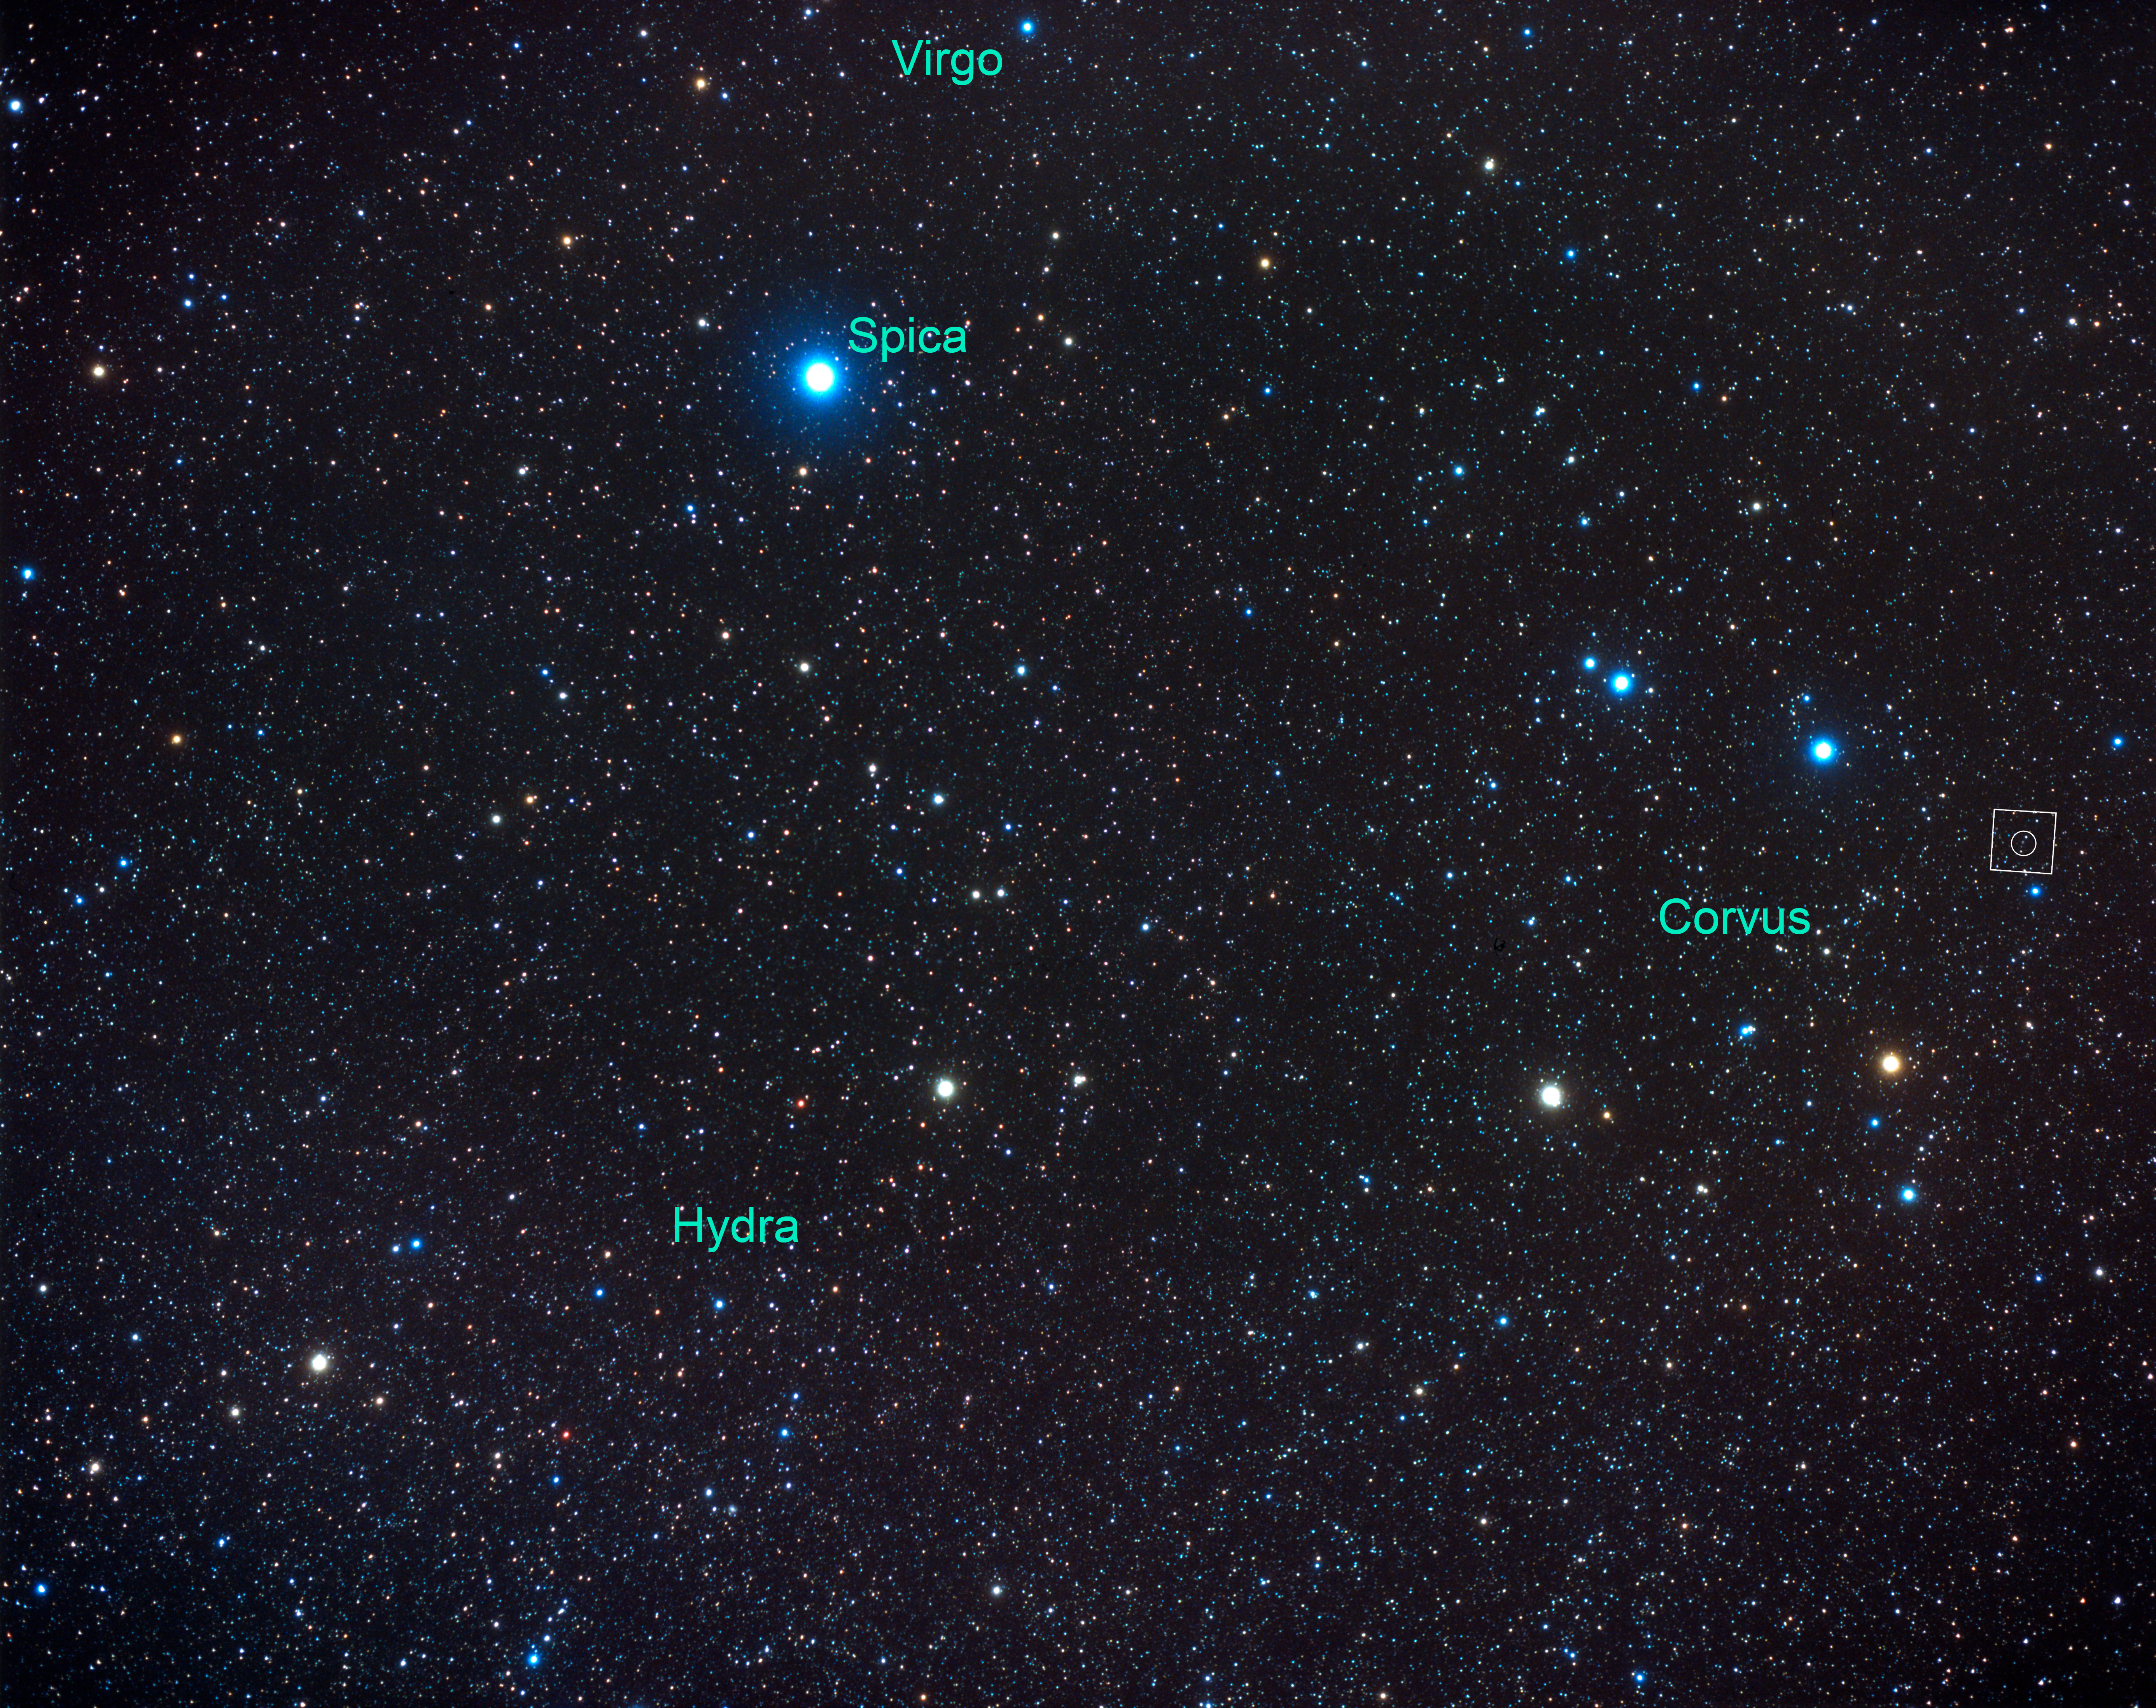

Constellation Corvus [annotated] (ground-based image)

This ground-based photo shows a wide angle view of the constellation Corvus and part of contellation Hydra. The Antennae galaxies is located in the southern constellation of Corvus.

Credit: NASA, ESA, Z. Levay (STScI) and A. Fujii